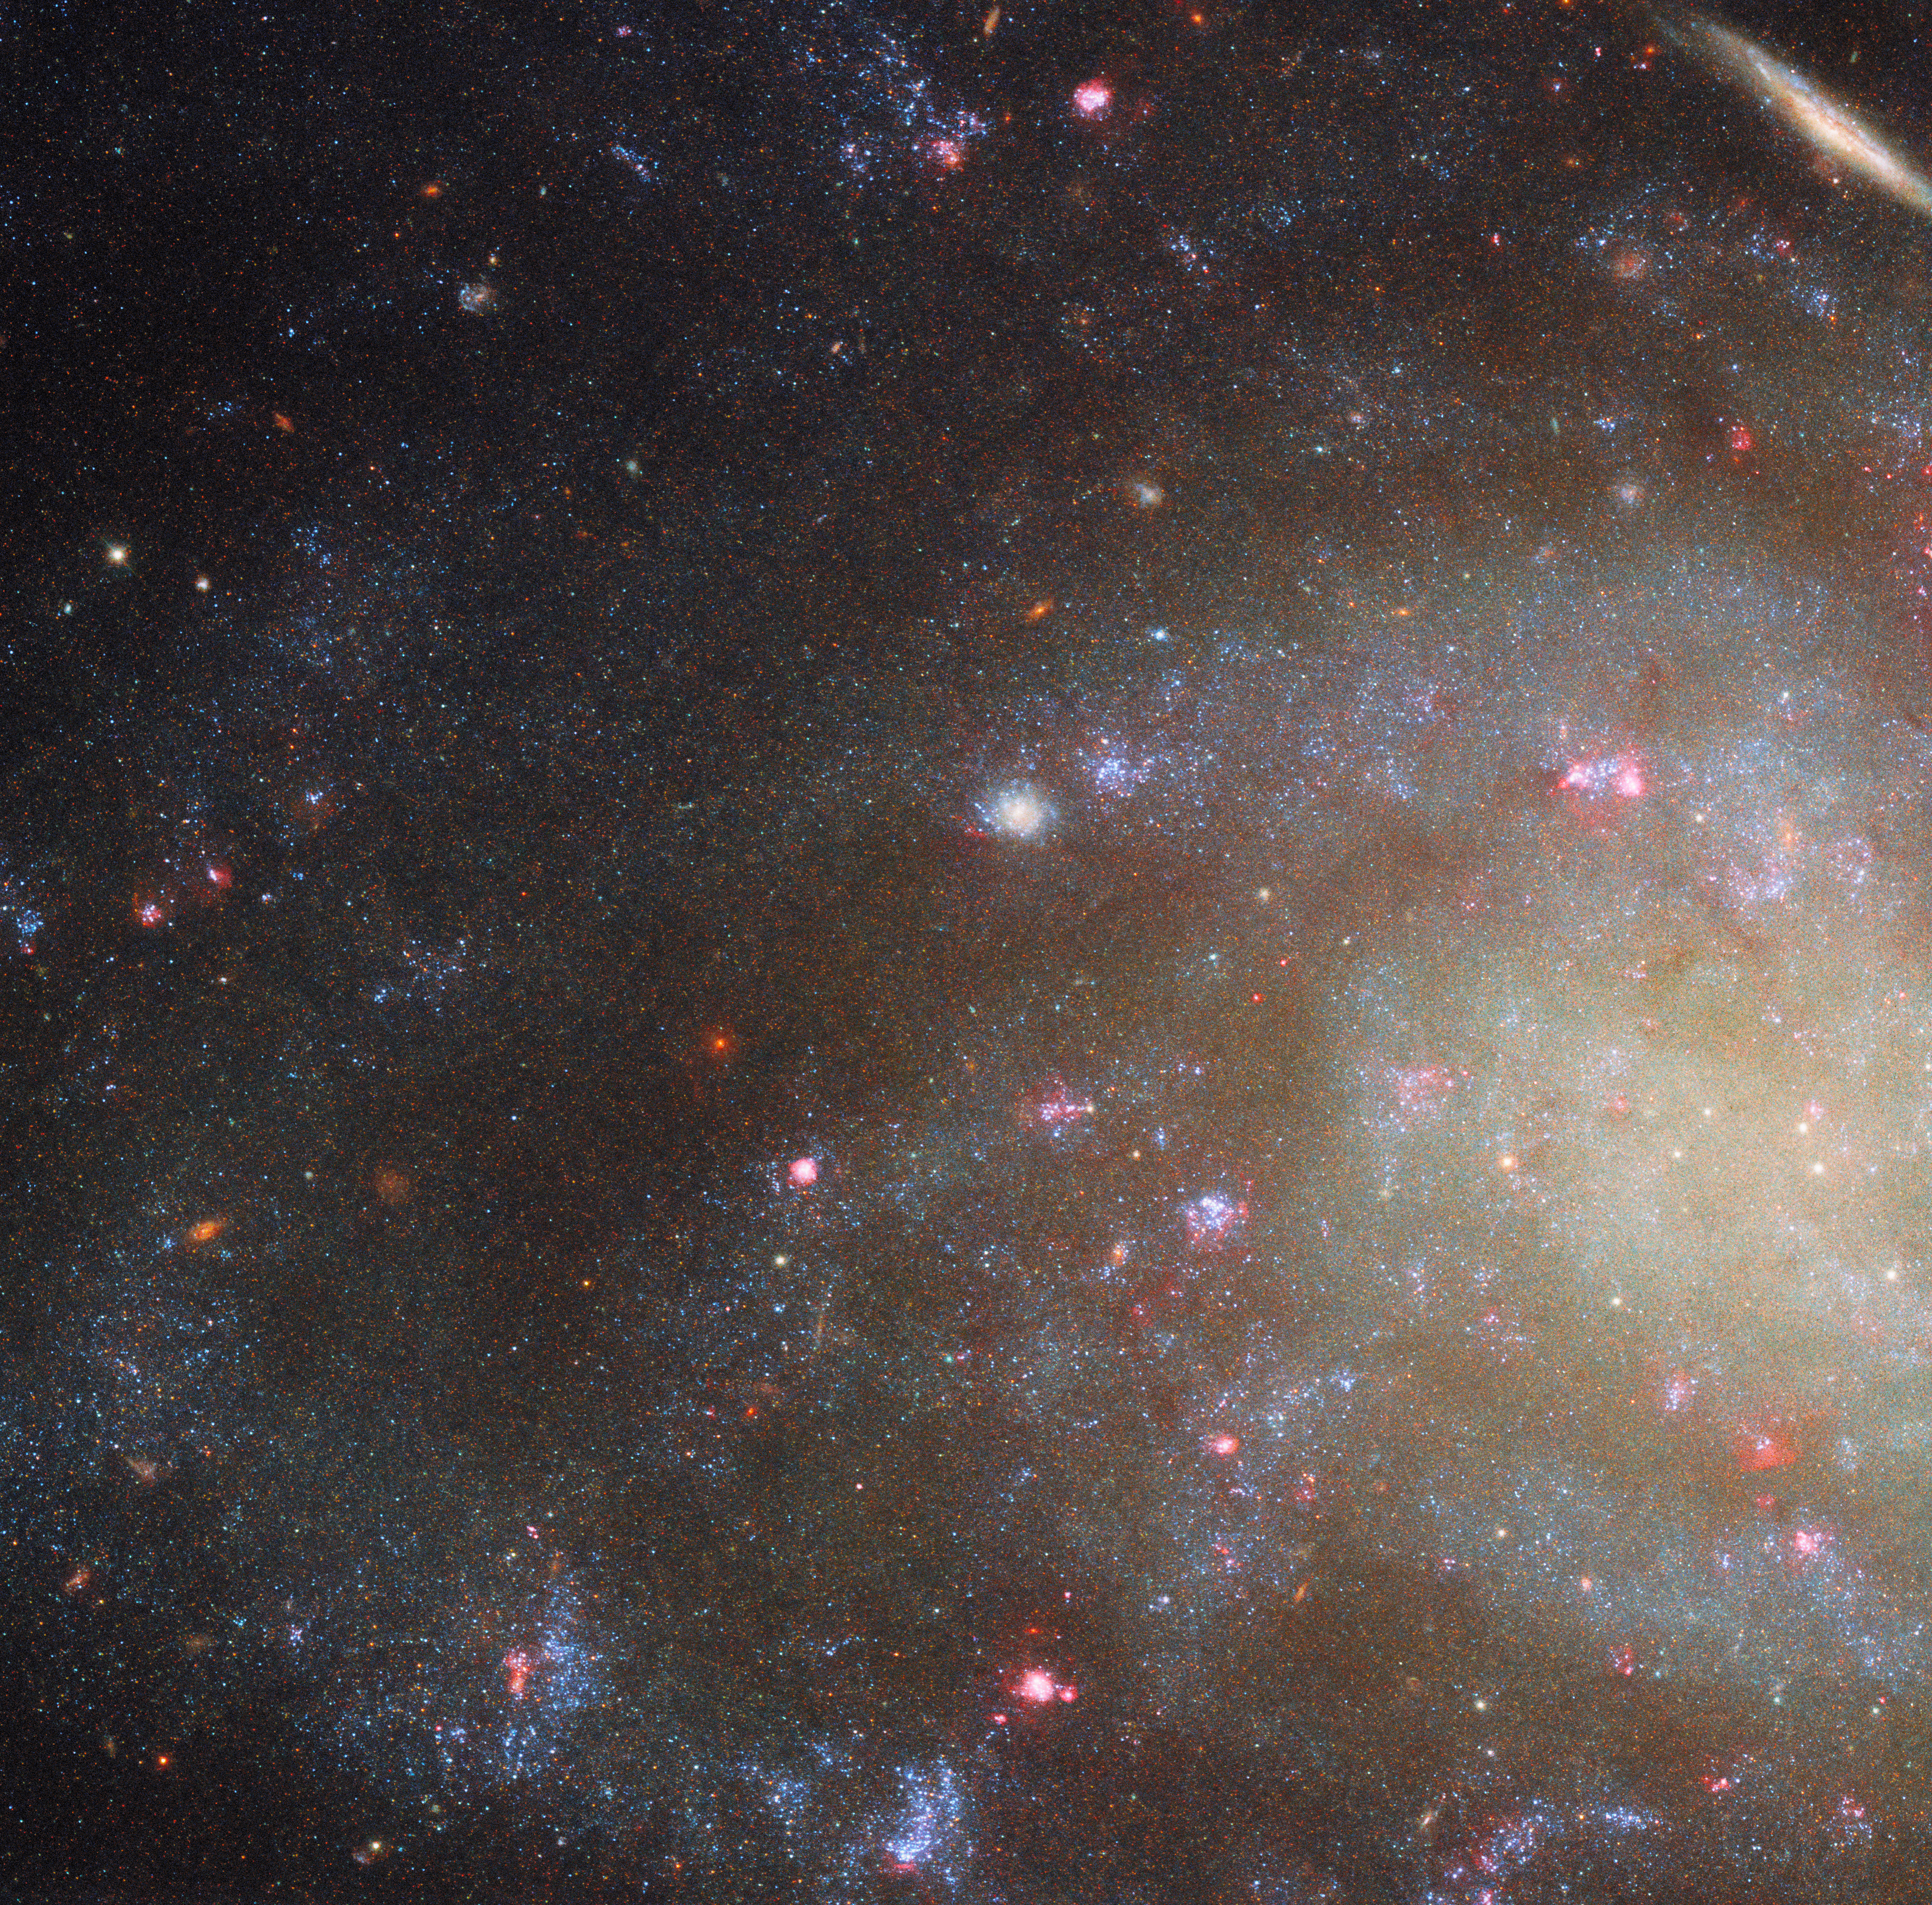

Low brightness, high interest

This NASA/ESA Hubble Space Telescope Picture of the Week zooms in on the feathery spiral arms of the galaxy NGC 45, which lies just 22 million light-years away in the constellation Cetus (The Whale).

The data used to create this portrait were drawn from two complementary observing programmes. The first took a broad view of 50 nearby galaxies, leveraging Hubble’s ability to observe light from the ultraviolet to the near-infrared in order to study star formation in these galaxies. The second programme examined many of the same nearby galaxies as the first, narrowing in on a particular wavelength of red light called H-alpha. Star-forming nebulae are powerful producers of H-alpha light, and several of these regions can be identified across NGC 45 by their bright pink-red colour.

These observing programmes aimed to study star formation in galaxies of different sizes, structures, and degrees of isolation — and NGC 45 makes for a particularly interesting target. Though it may appear to be a regular spiral galaxy, NGC 45 is actually a remarkable type called a low surface brightness galaxy.

Low surface brightness galaxies are fainter than the night sky itself, making them incredibly difficult to detect. They appear unexpectedly faint because they have relatively few stars for the amount of gas and dark matter they carry. In the decades since the first low surface brightness galaxy was serendipitously discovered in 1986, researchers have learned that 30–60% of all galaxies may fall into this category. Studying these hard-to-detect galaxies is key to understanding how galaxies form and evolve, and Hubble’s sensitive instruments are equal to the task.

Credit: ESA/Hubble & NASA, D. Calzetti, R. Chandar Acknowledgement: M. H. Özsaraç